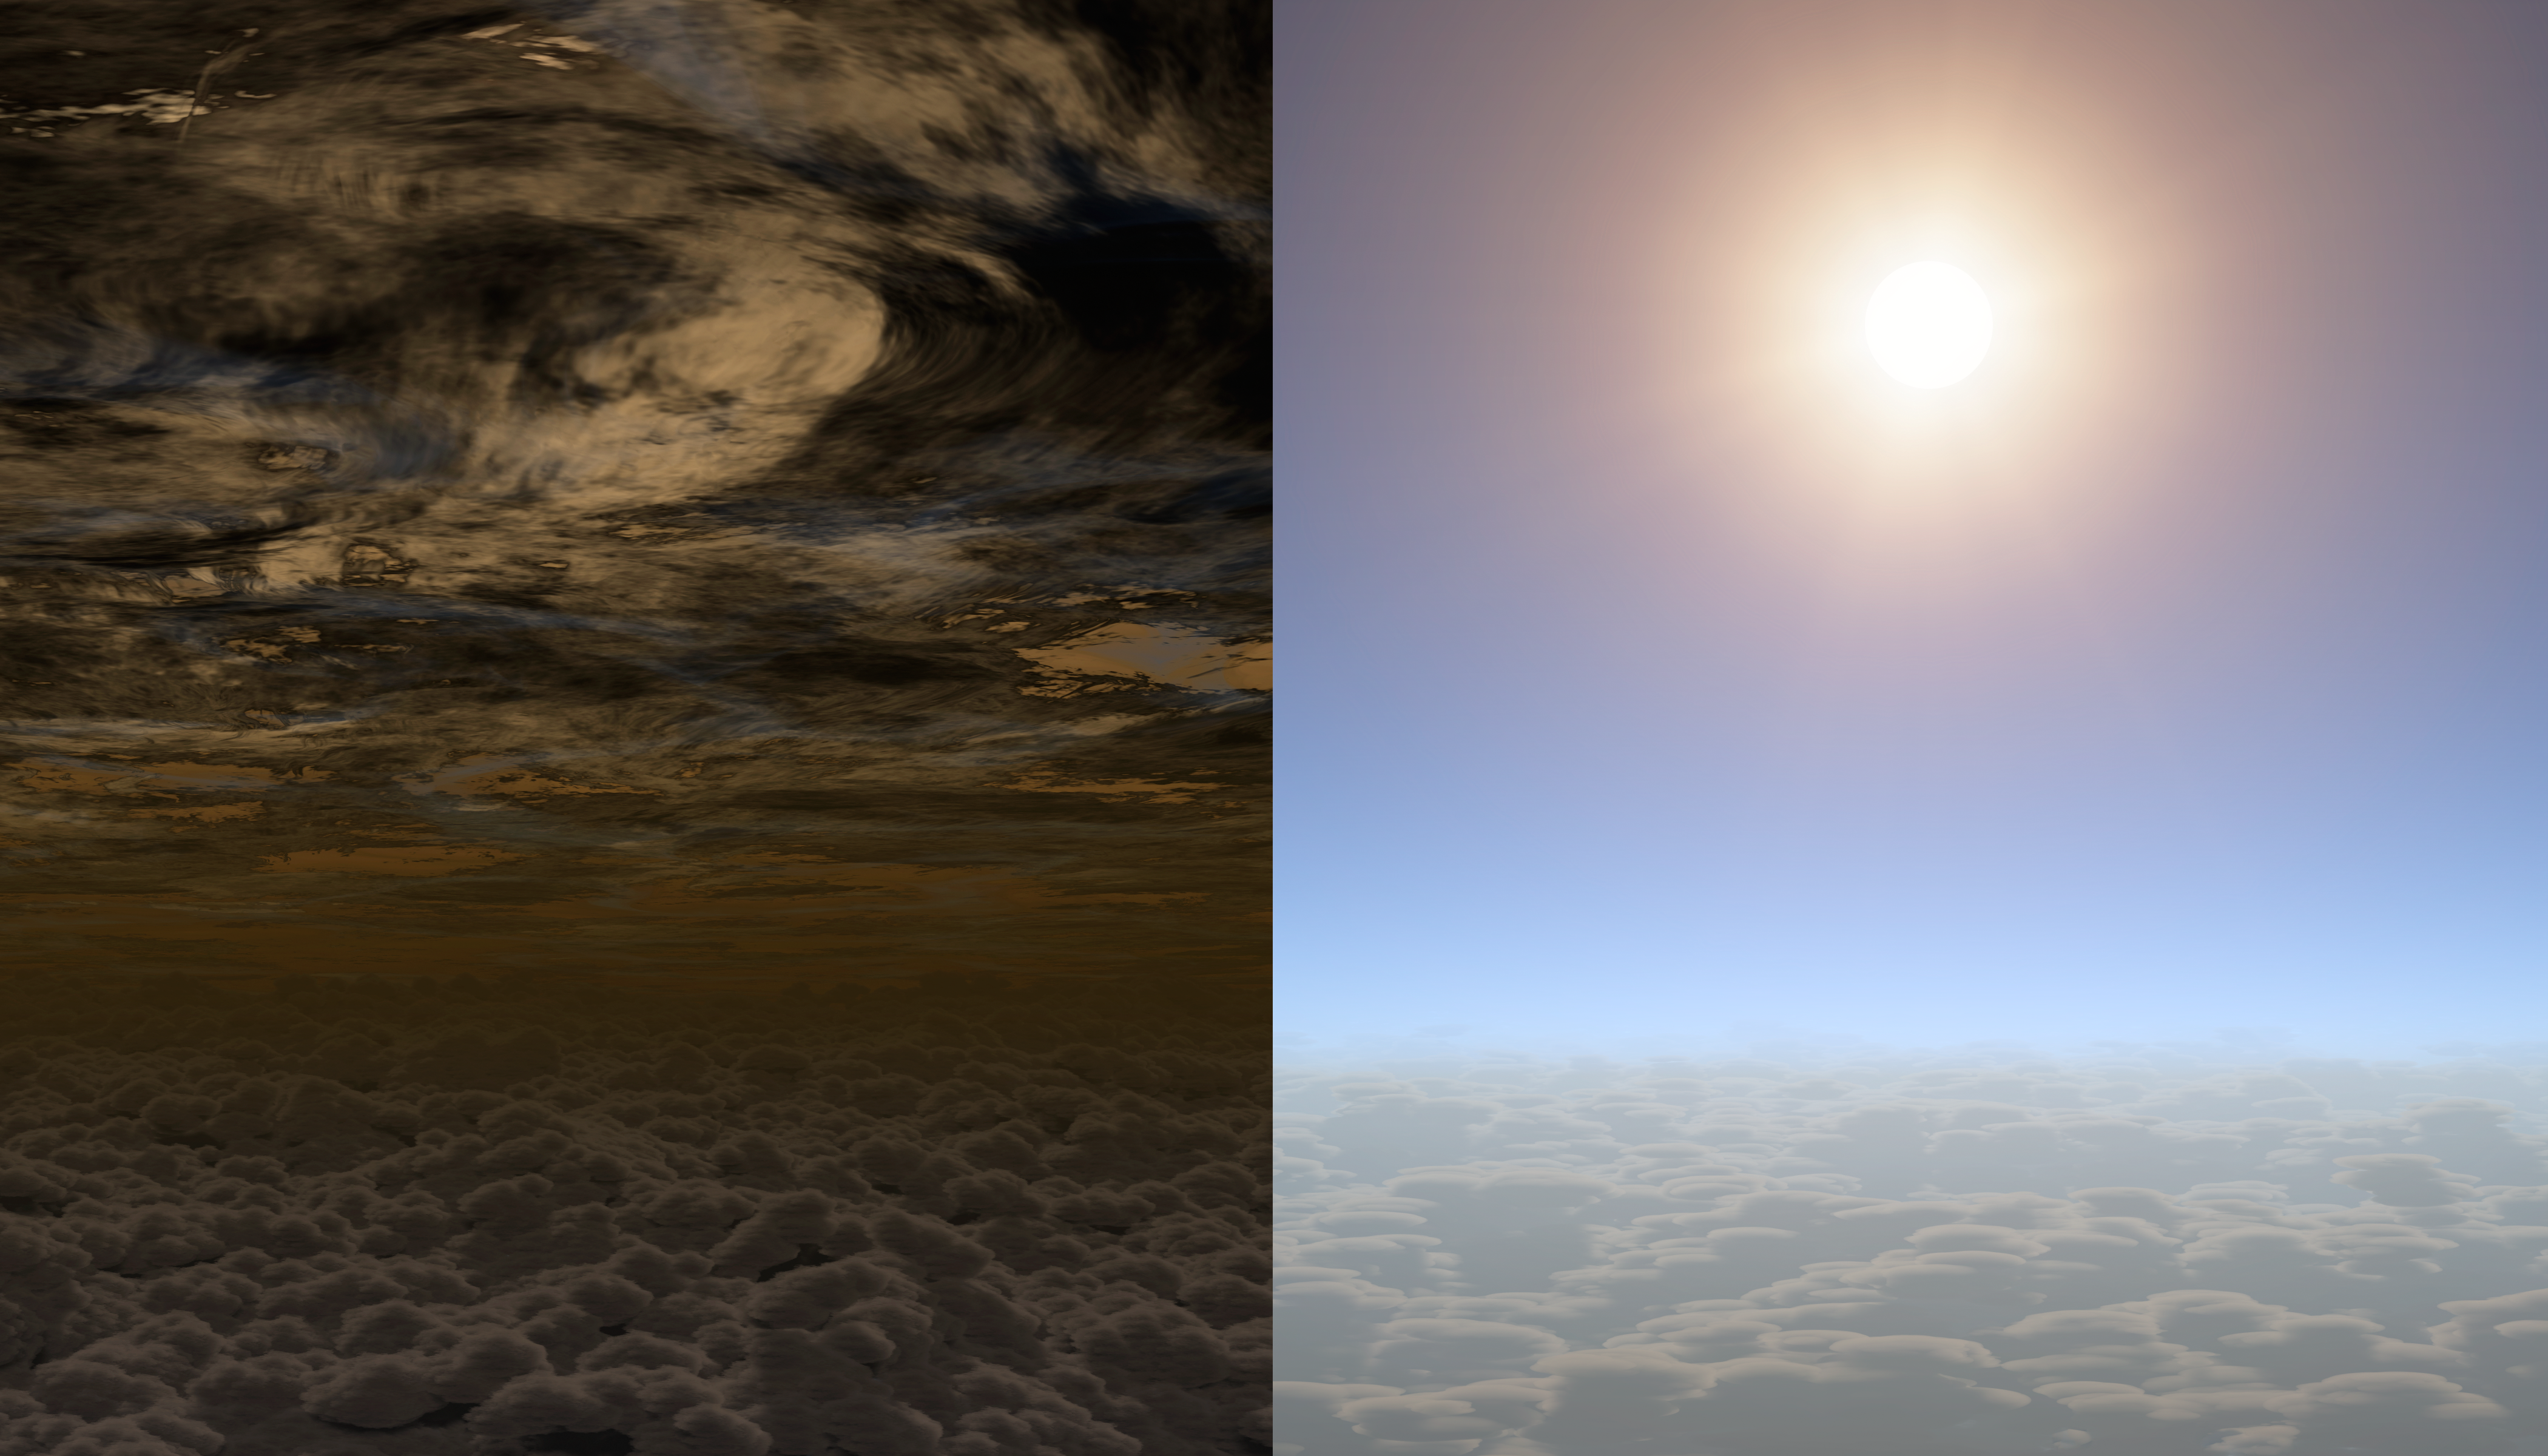

Artist illustration showing clear skies on planet HAT-P-11b

This artist's concept shows what the sky may look like on other planets. On the left is a planet with an atmosphere of thick clouds and on the right a planet with clear skies.

The clear sky on the right may well resemble the skies of planet HAT-P-11b. This planet, a Neptune-sized body orbiting a distant star, has recently been studied and found to have clear skies. This is very useful as clouds in the atmospheres of planets can block the view to underlying molecules that reveal information about a planet's composition and history.

Credit: NASA/JPL-Caltech